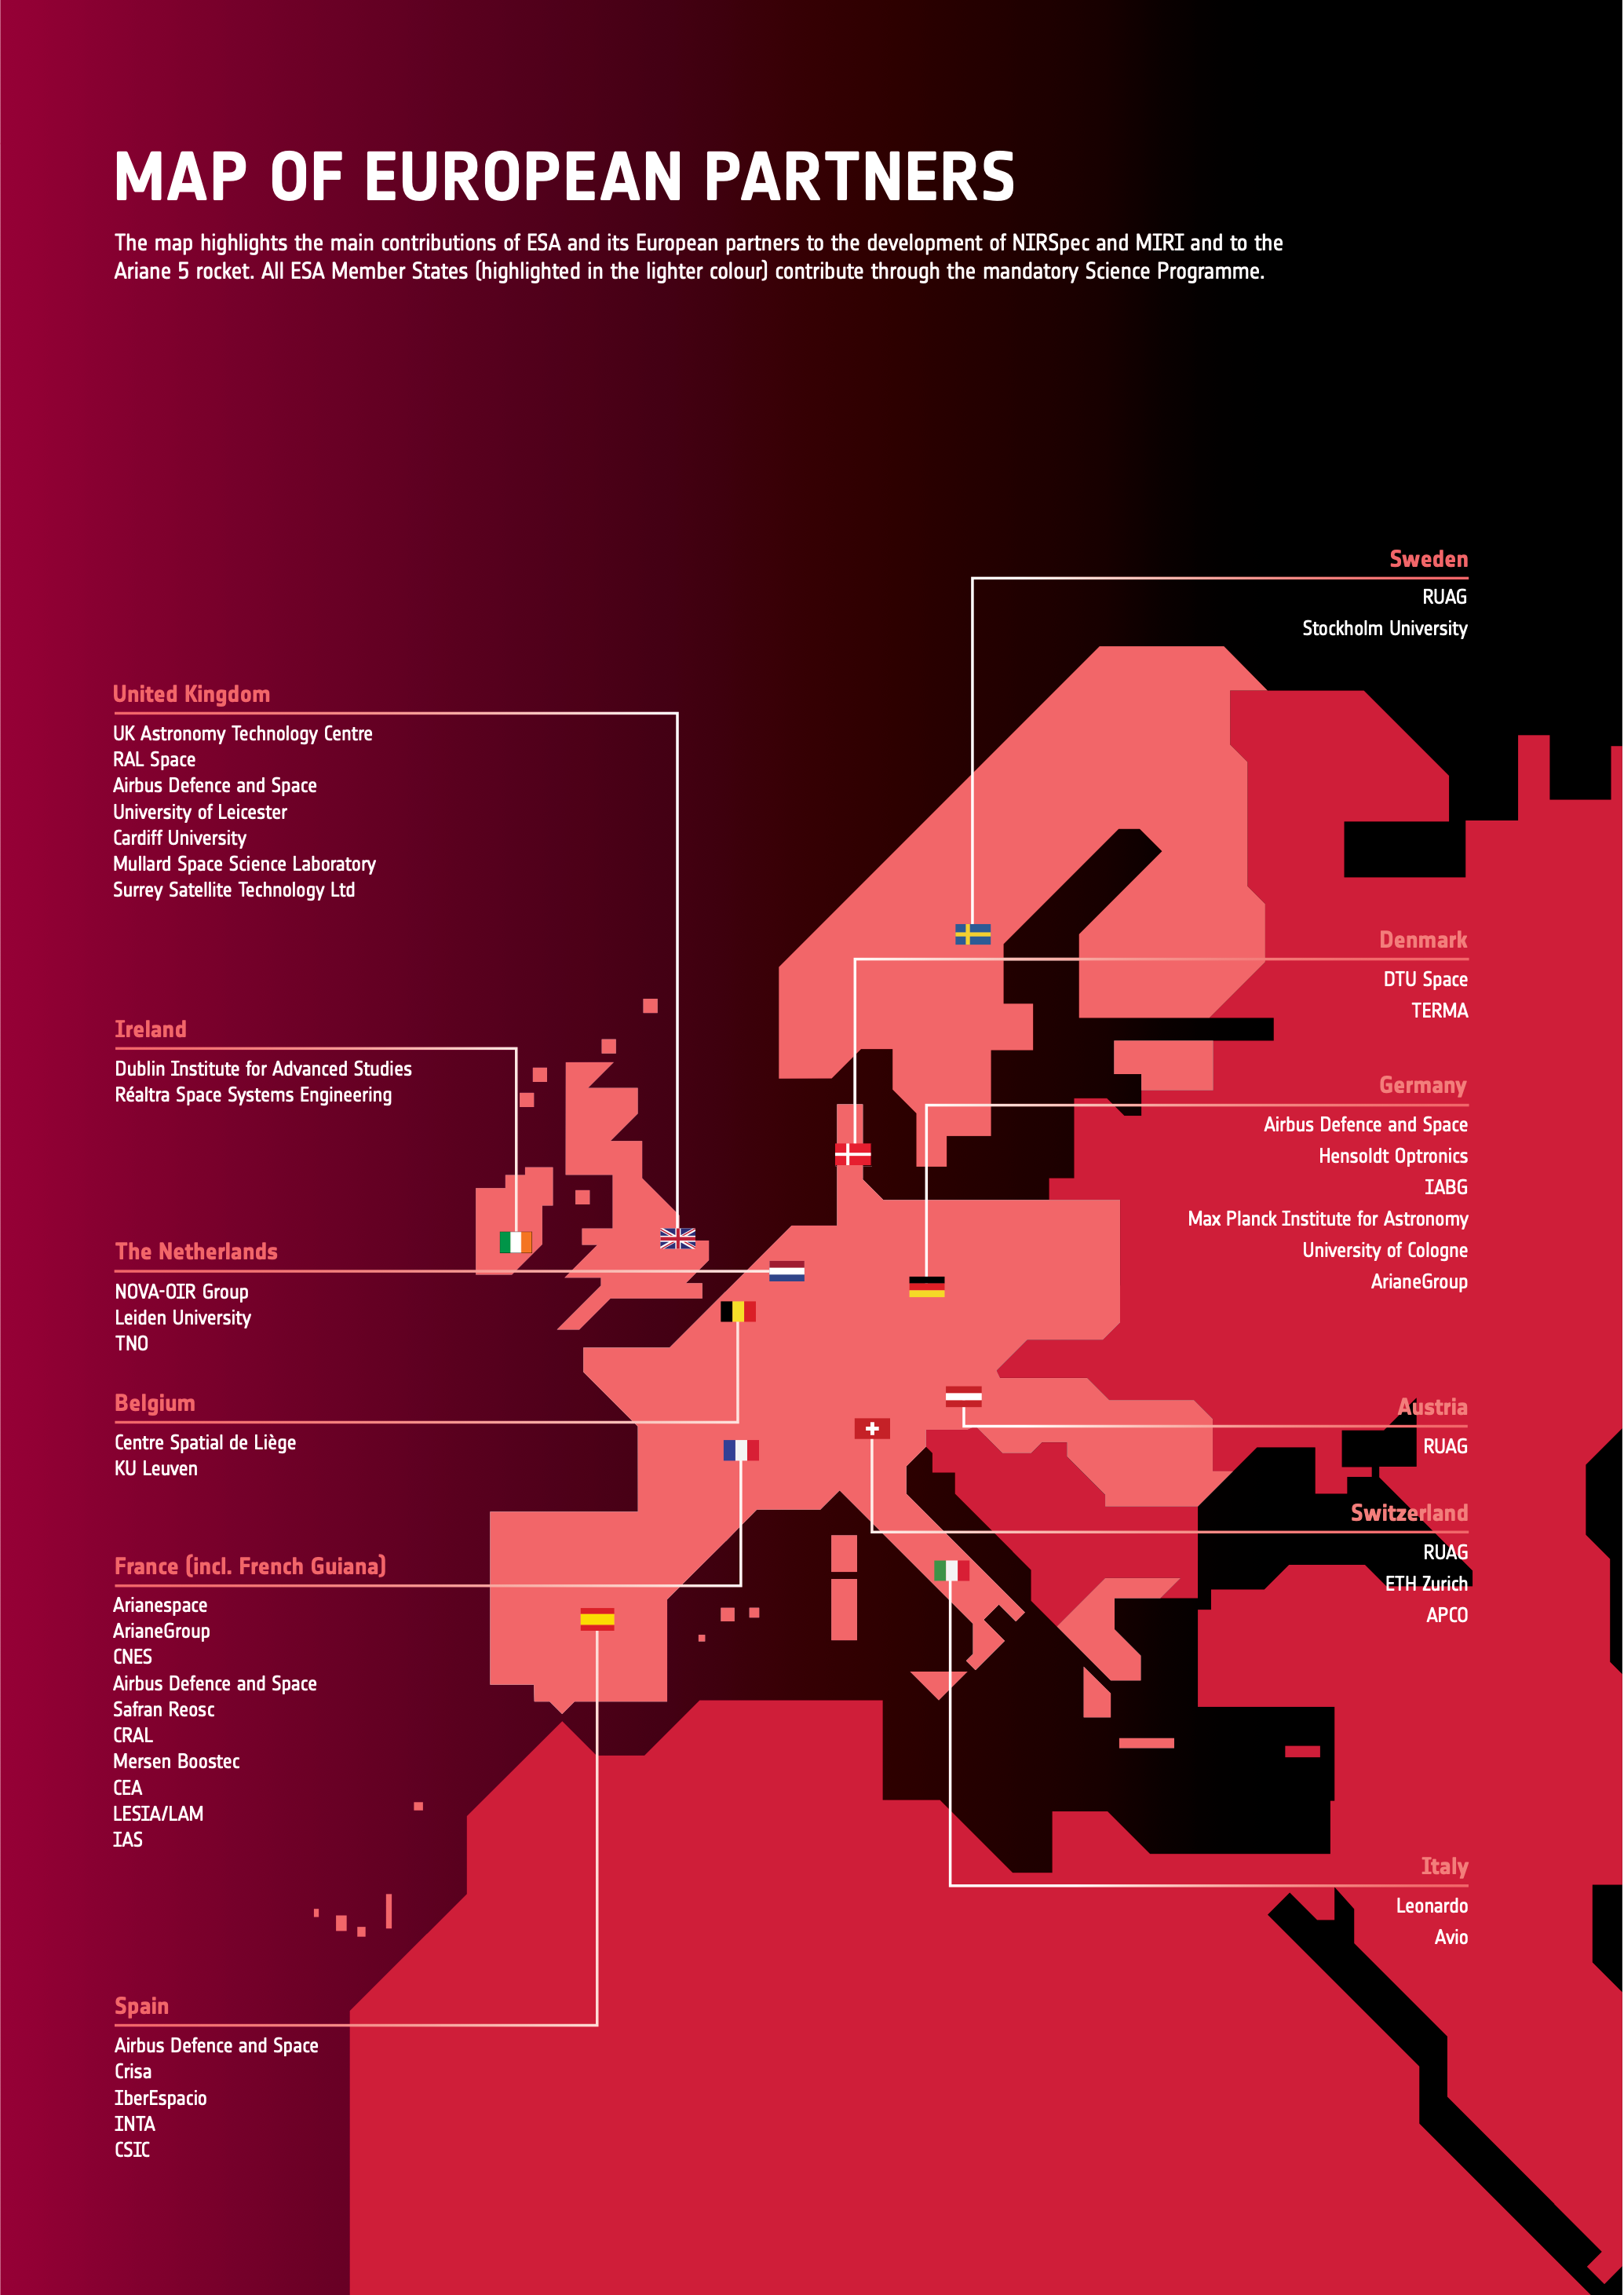

Map of Webb's European Partners

The map highlights the main contributions of ESA and its European partners to the development of Webb's NIRSpec and MIRI instruments and to the Ariane 5 rocket. All ESA Member States contribute through the mandatory Science Programme.

Credit: ESA/Webb